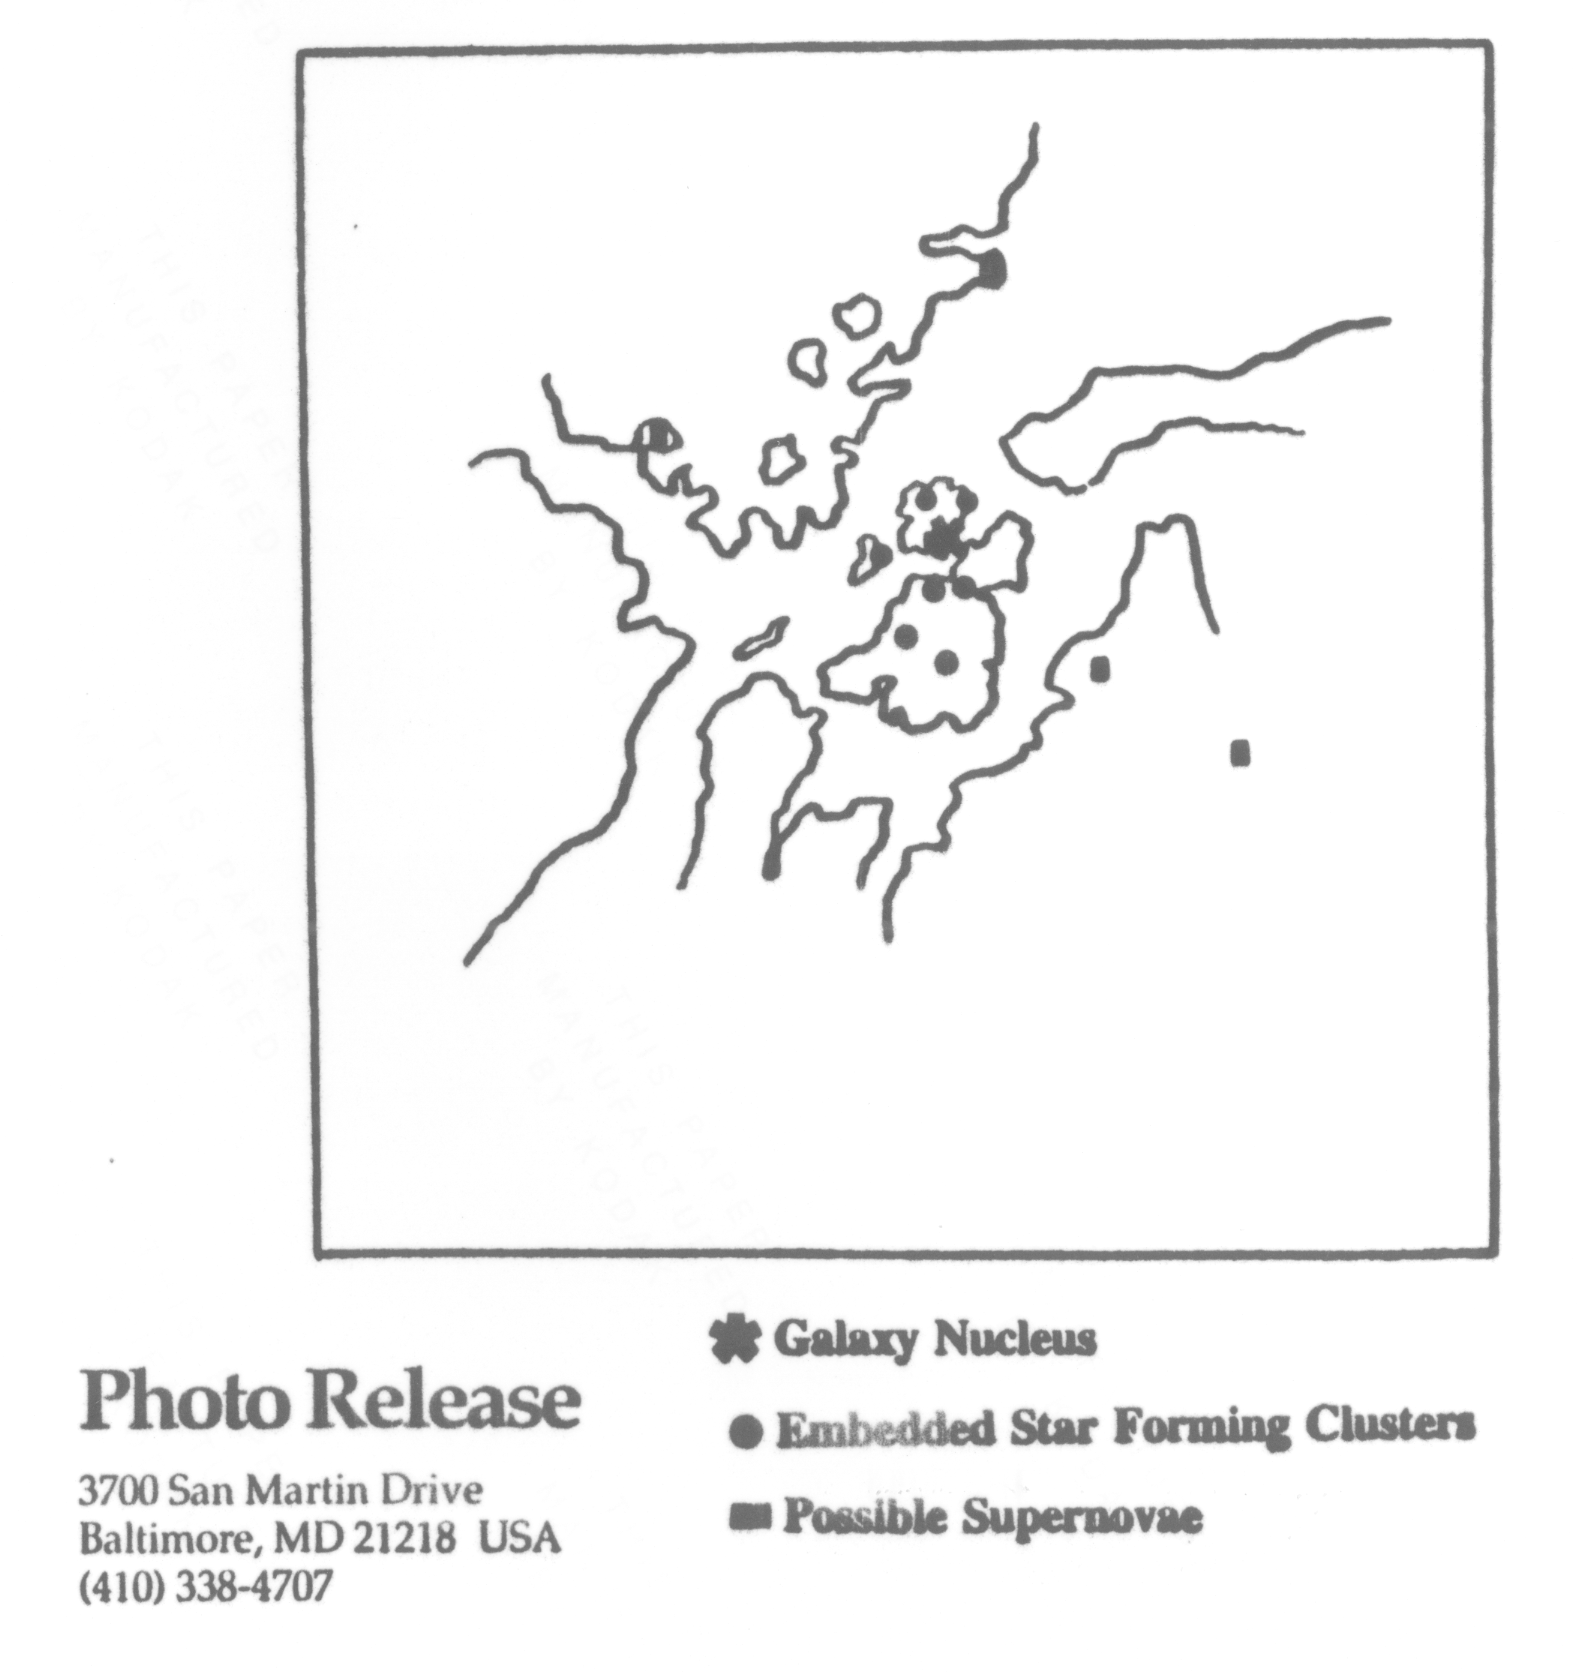

Starburst galaxy illustration

Starburst galaxy illustration

Credit: NASA & ESA